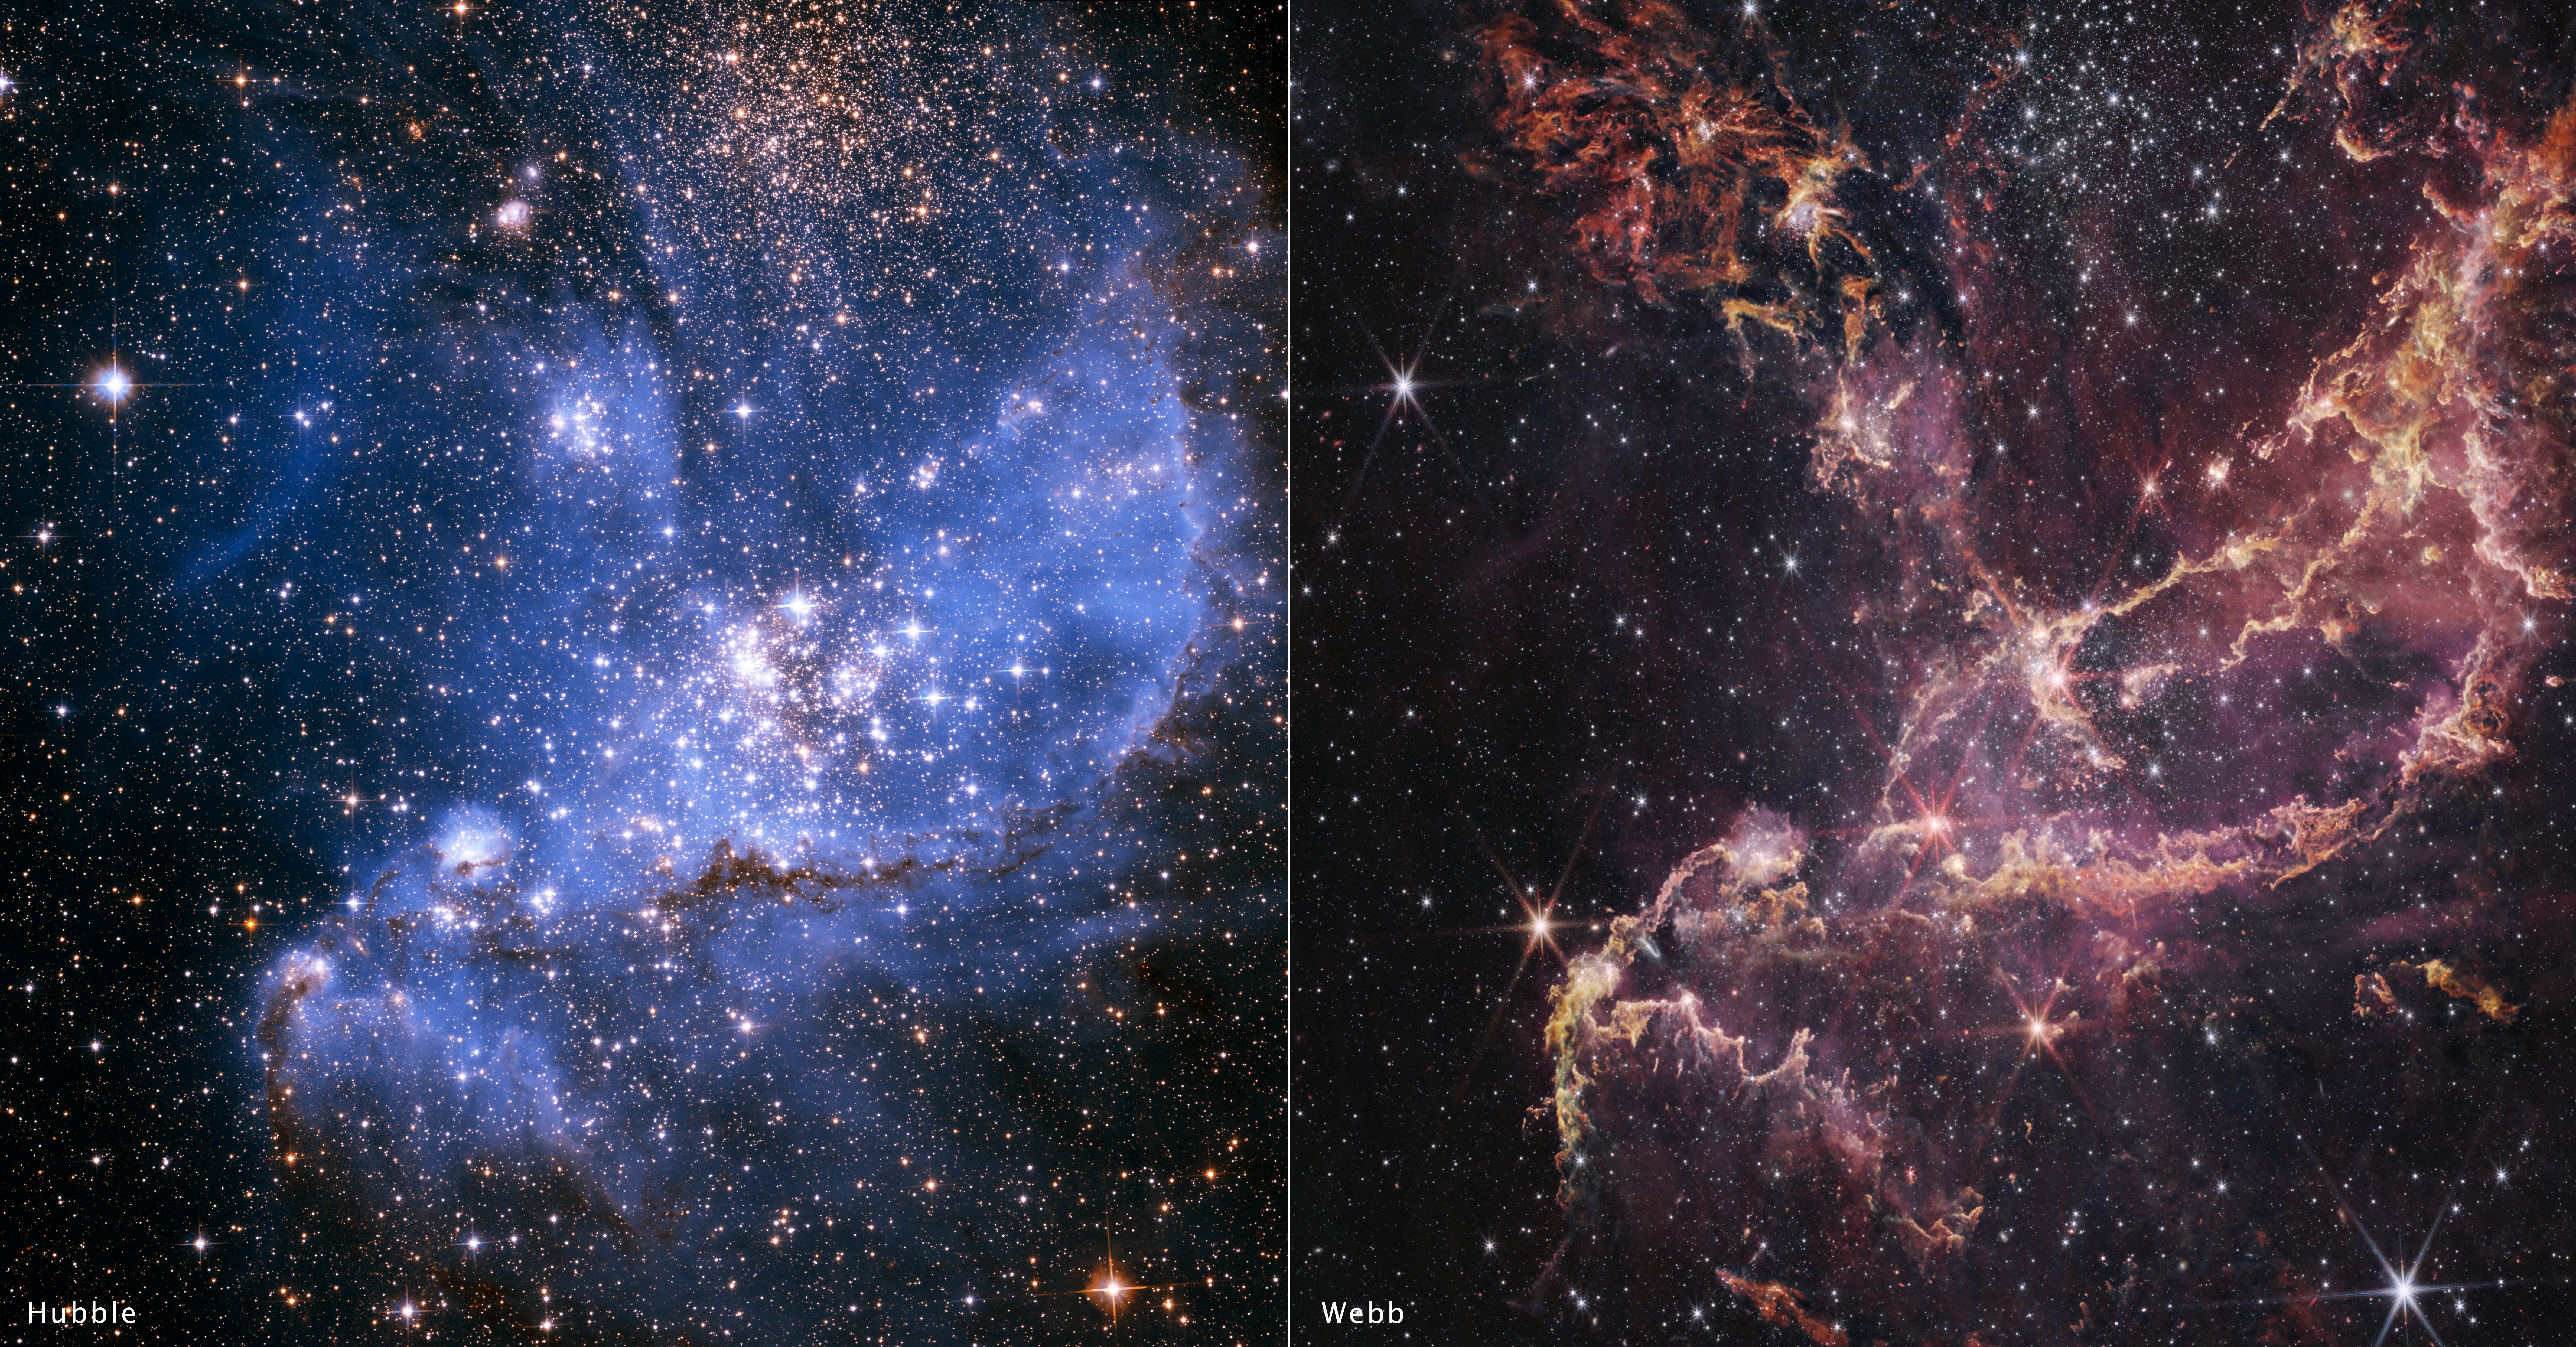

NGC 346 side-by-side images: Hubble and Webb

This side-by-side comparison shows a Hubble image of the massive star cluster NGC 346 (left) versus a Webb image of the same cluster (right). While the Hubble image shows more nebulosity, the Webb image pierces through those clouds to reveal more of the cluster’s structure. NGC 346 has a relative lack of elements heavier than helium and hydrogen, making it a good proxy for stellar environments in the early, distant universe.

Credit: NASA, ESA, CSA, STScI, O. C. Jones (UK ATC), G. De Marchi (ESTEC), M. Meixner (USRA), A. Nota (ESA)